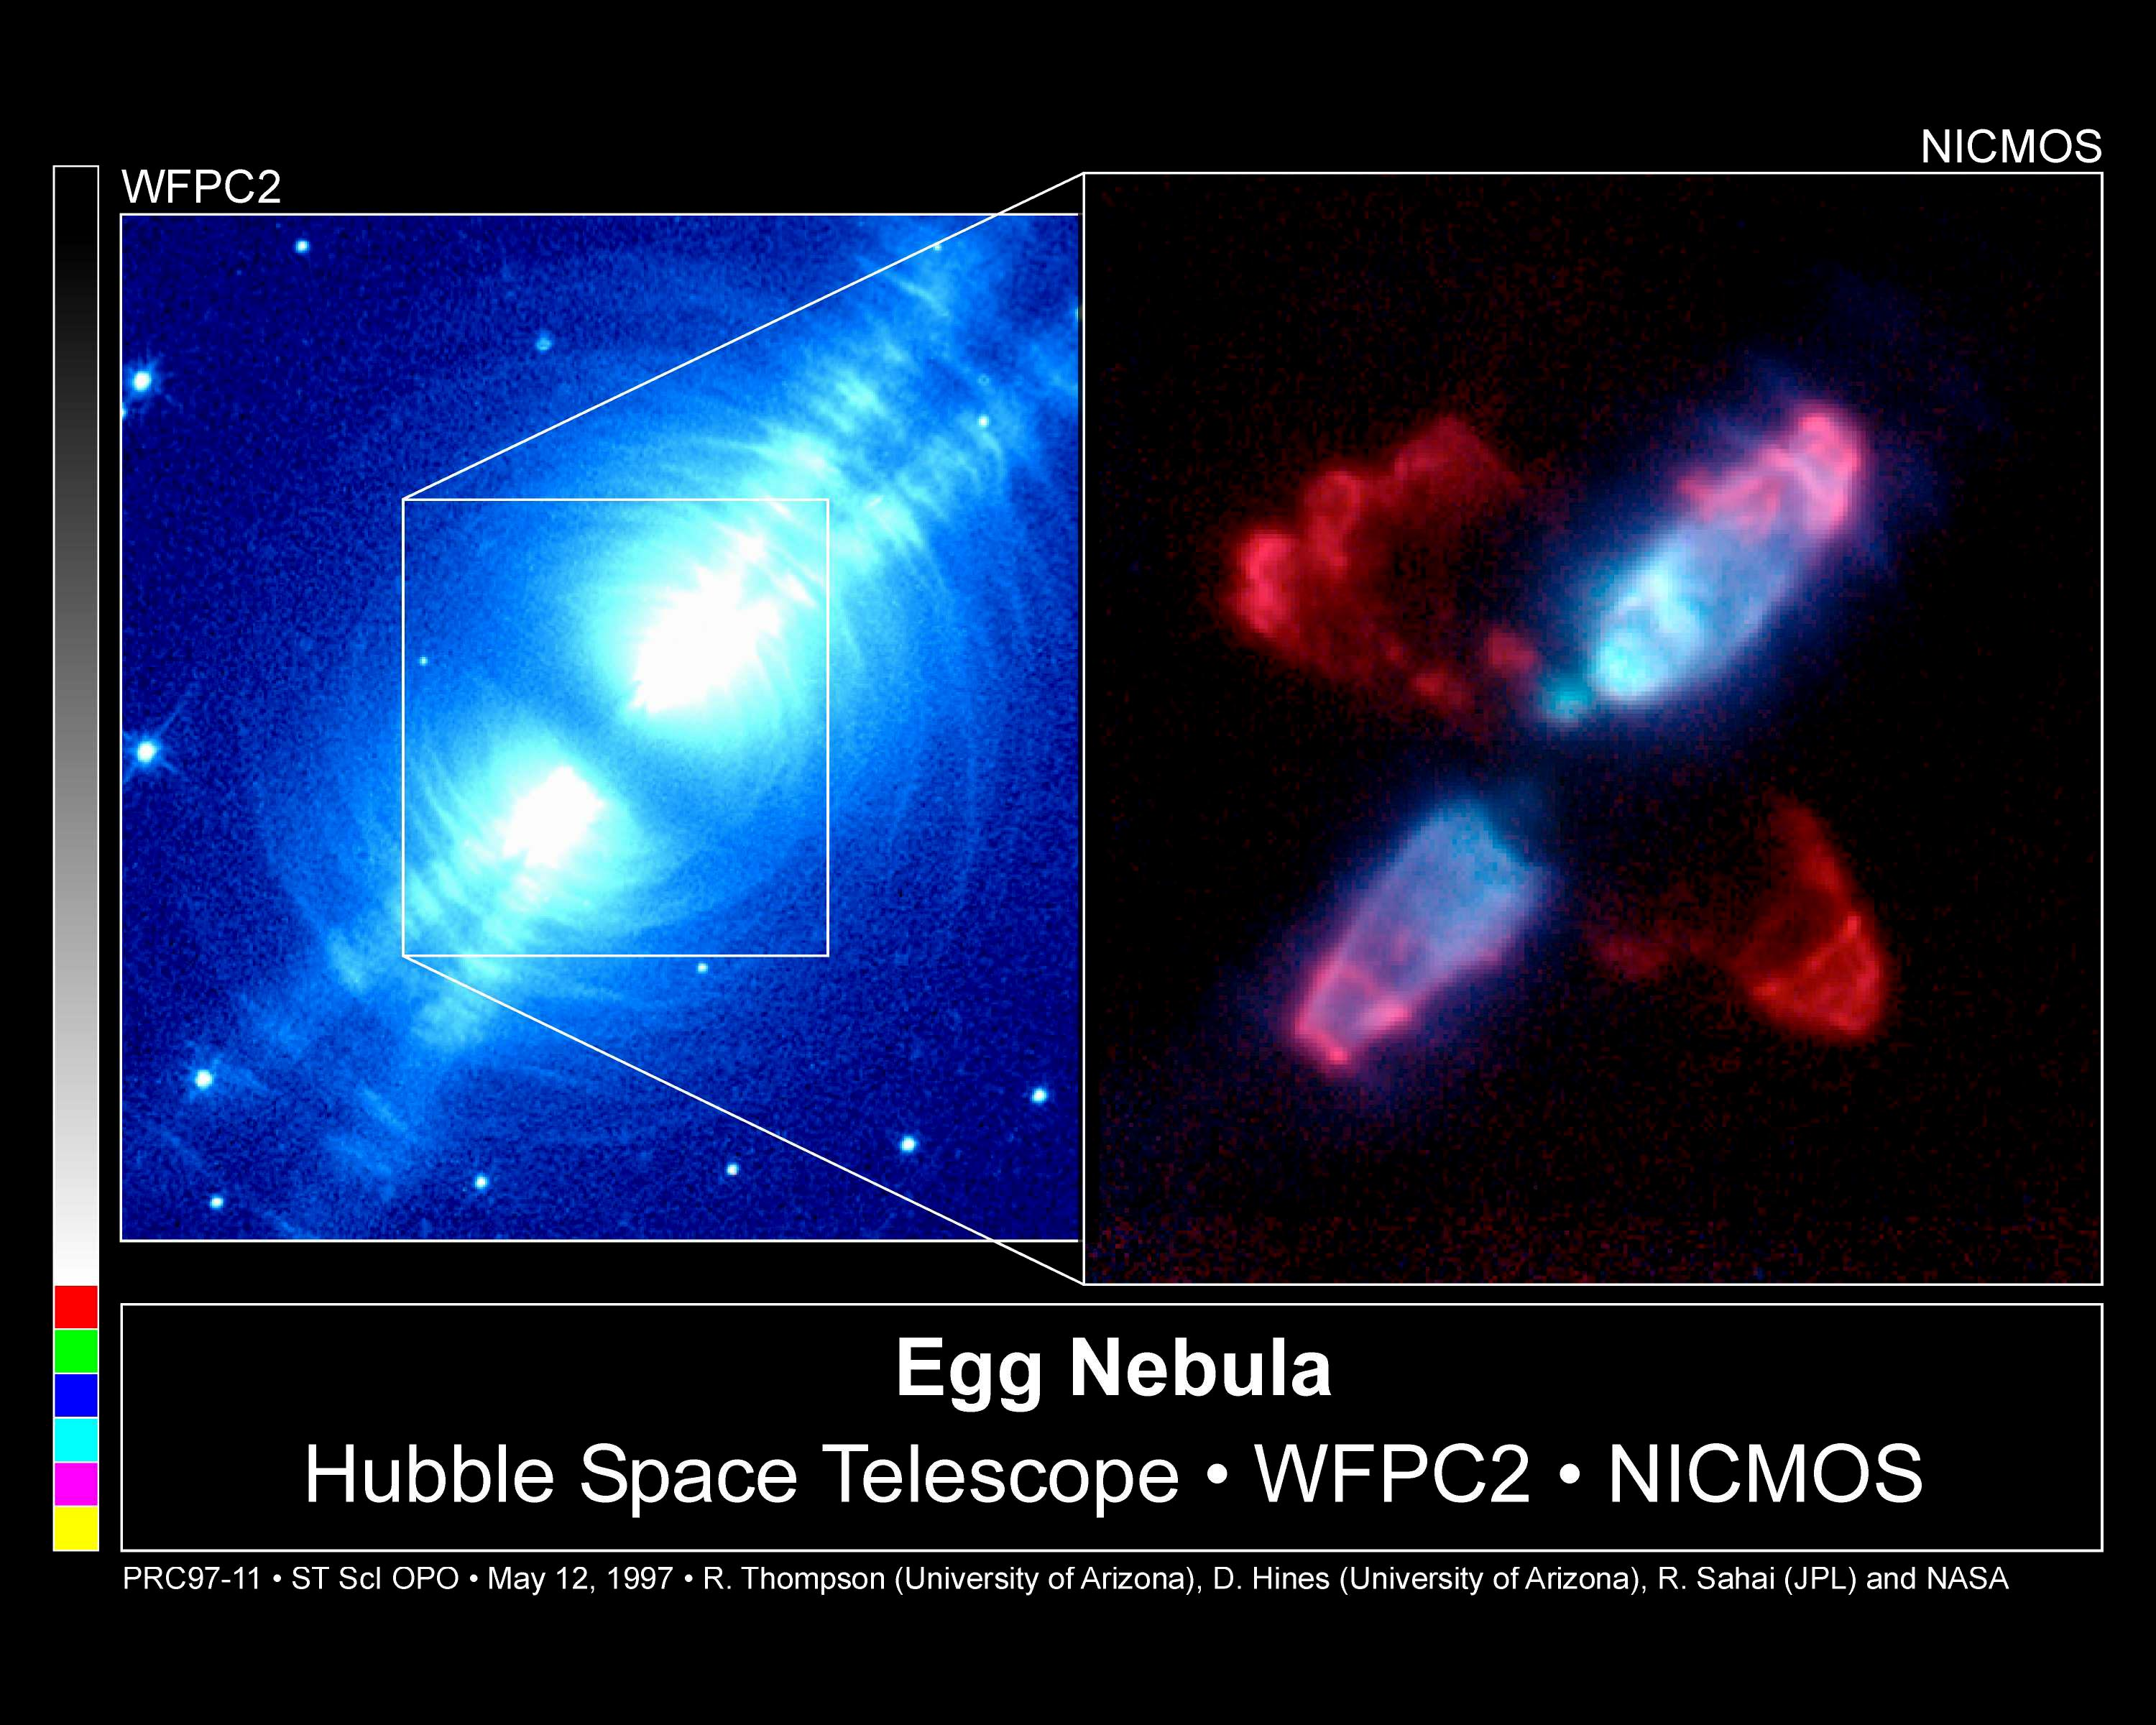

NICMOS Peers Into Heart of Dying Star

The Egg Nebula, also known as CRL 2688, is shown on the left as it appears in visible light with the Hubble Space Telescope's Wide Field and Planetary Camera 2(WFPC2) and on the right as it appears in infrared light with Hubble's Near Infrared Camera and Multi-Object Spectrometer (NICMOS). Since infrared light is invisible to humans, the NICMOS image has been assigned colours to distinguish different wavelengths: blue corresponds to starlight reflected by dust particles, and red corresponds to heat radiation emitted by hot molecular hydrogen.

Credit: Rodger Thompson, Marcia Rieke, Glenn Schneider, Dean Hines (Universityof Arizona); Raghvendra Sahai (Jet Propulsion Laboratory); NICMOS Instrument Definition Team; and NASA/ESA